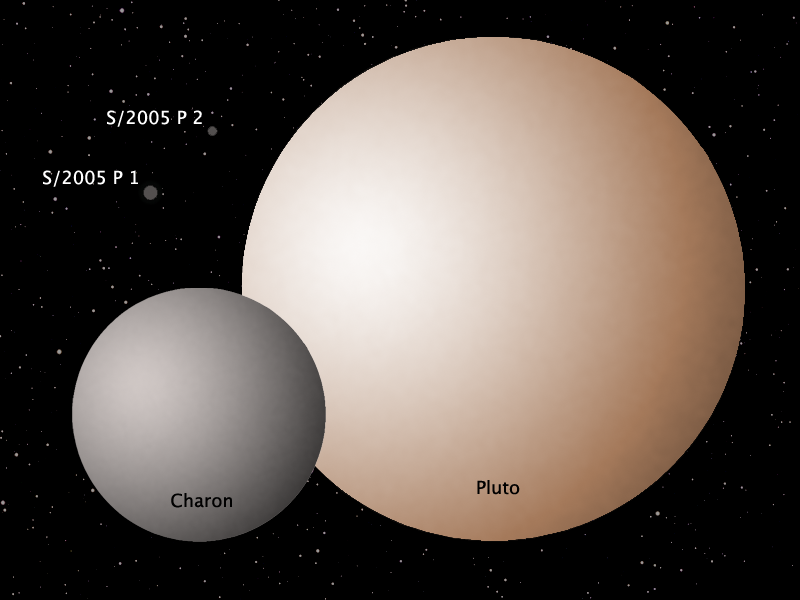

Schematic of the Pluto system

The new HST/ACS observations made on March 2nd reveal that all three of Pluto's satellites are neutrally colored, unlike reddish Pluto itself. Pluto's reddish colour is believed to be due to reddening agents created by the effects of sunlight acting on its nitrogen and methane surface ices. Charon's surface is known to consist primarily of water ice; the similar colour of P1 and P2 may indicate they too have water ice surfaces. The colour similarity of Pluto's two small satellites to one another and to Charon is consistent with their all having been born as a result of a single giant impact, as previously indicated by their orbits and Charon's large mass.

Credit: NASA, ESA, A. Stern (SwRI) and Z. Levay (STScI)